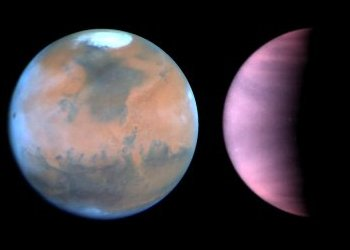

Hubble Monitors Weather on Mars and Venus

What's the weather for Mars and Venus? The Hubble telescope has given astronomers a peak. The telescope is serving as an interplanetary weather satellite for studying the climate on Earth's neighboring worlds, Mars and Venus.

To the surprise of researchers, Hubble is showing that the Martian climate has changed considerably since the unmanned Viking spacecraft visited the Red Planet in the mid-1970s. The Hubble pictures indicate that the planet is cooler, clearer, and drier than a couple of decades ago. In striking contrast, Hubble's observations of Venus show that the atmosphere continues to recover from an intense bout of sulfuric "acid rain," triggered by the suspected eruption of a volcano in the late 1970s.

Credit: NASA & ESA